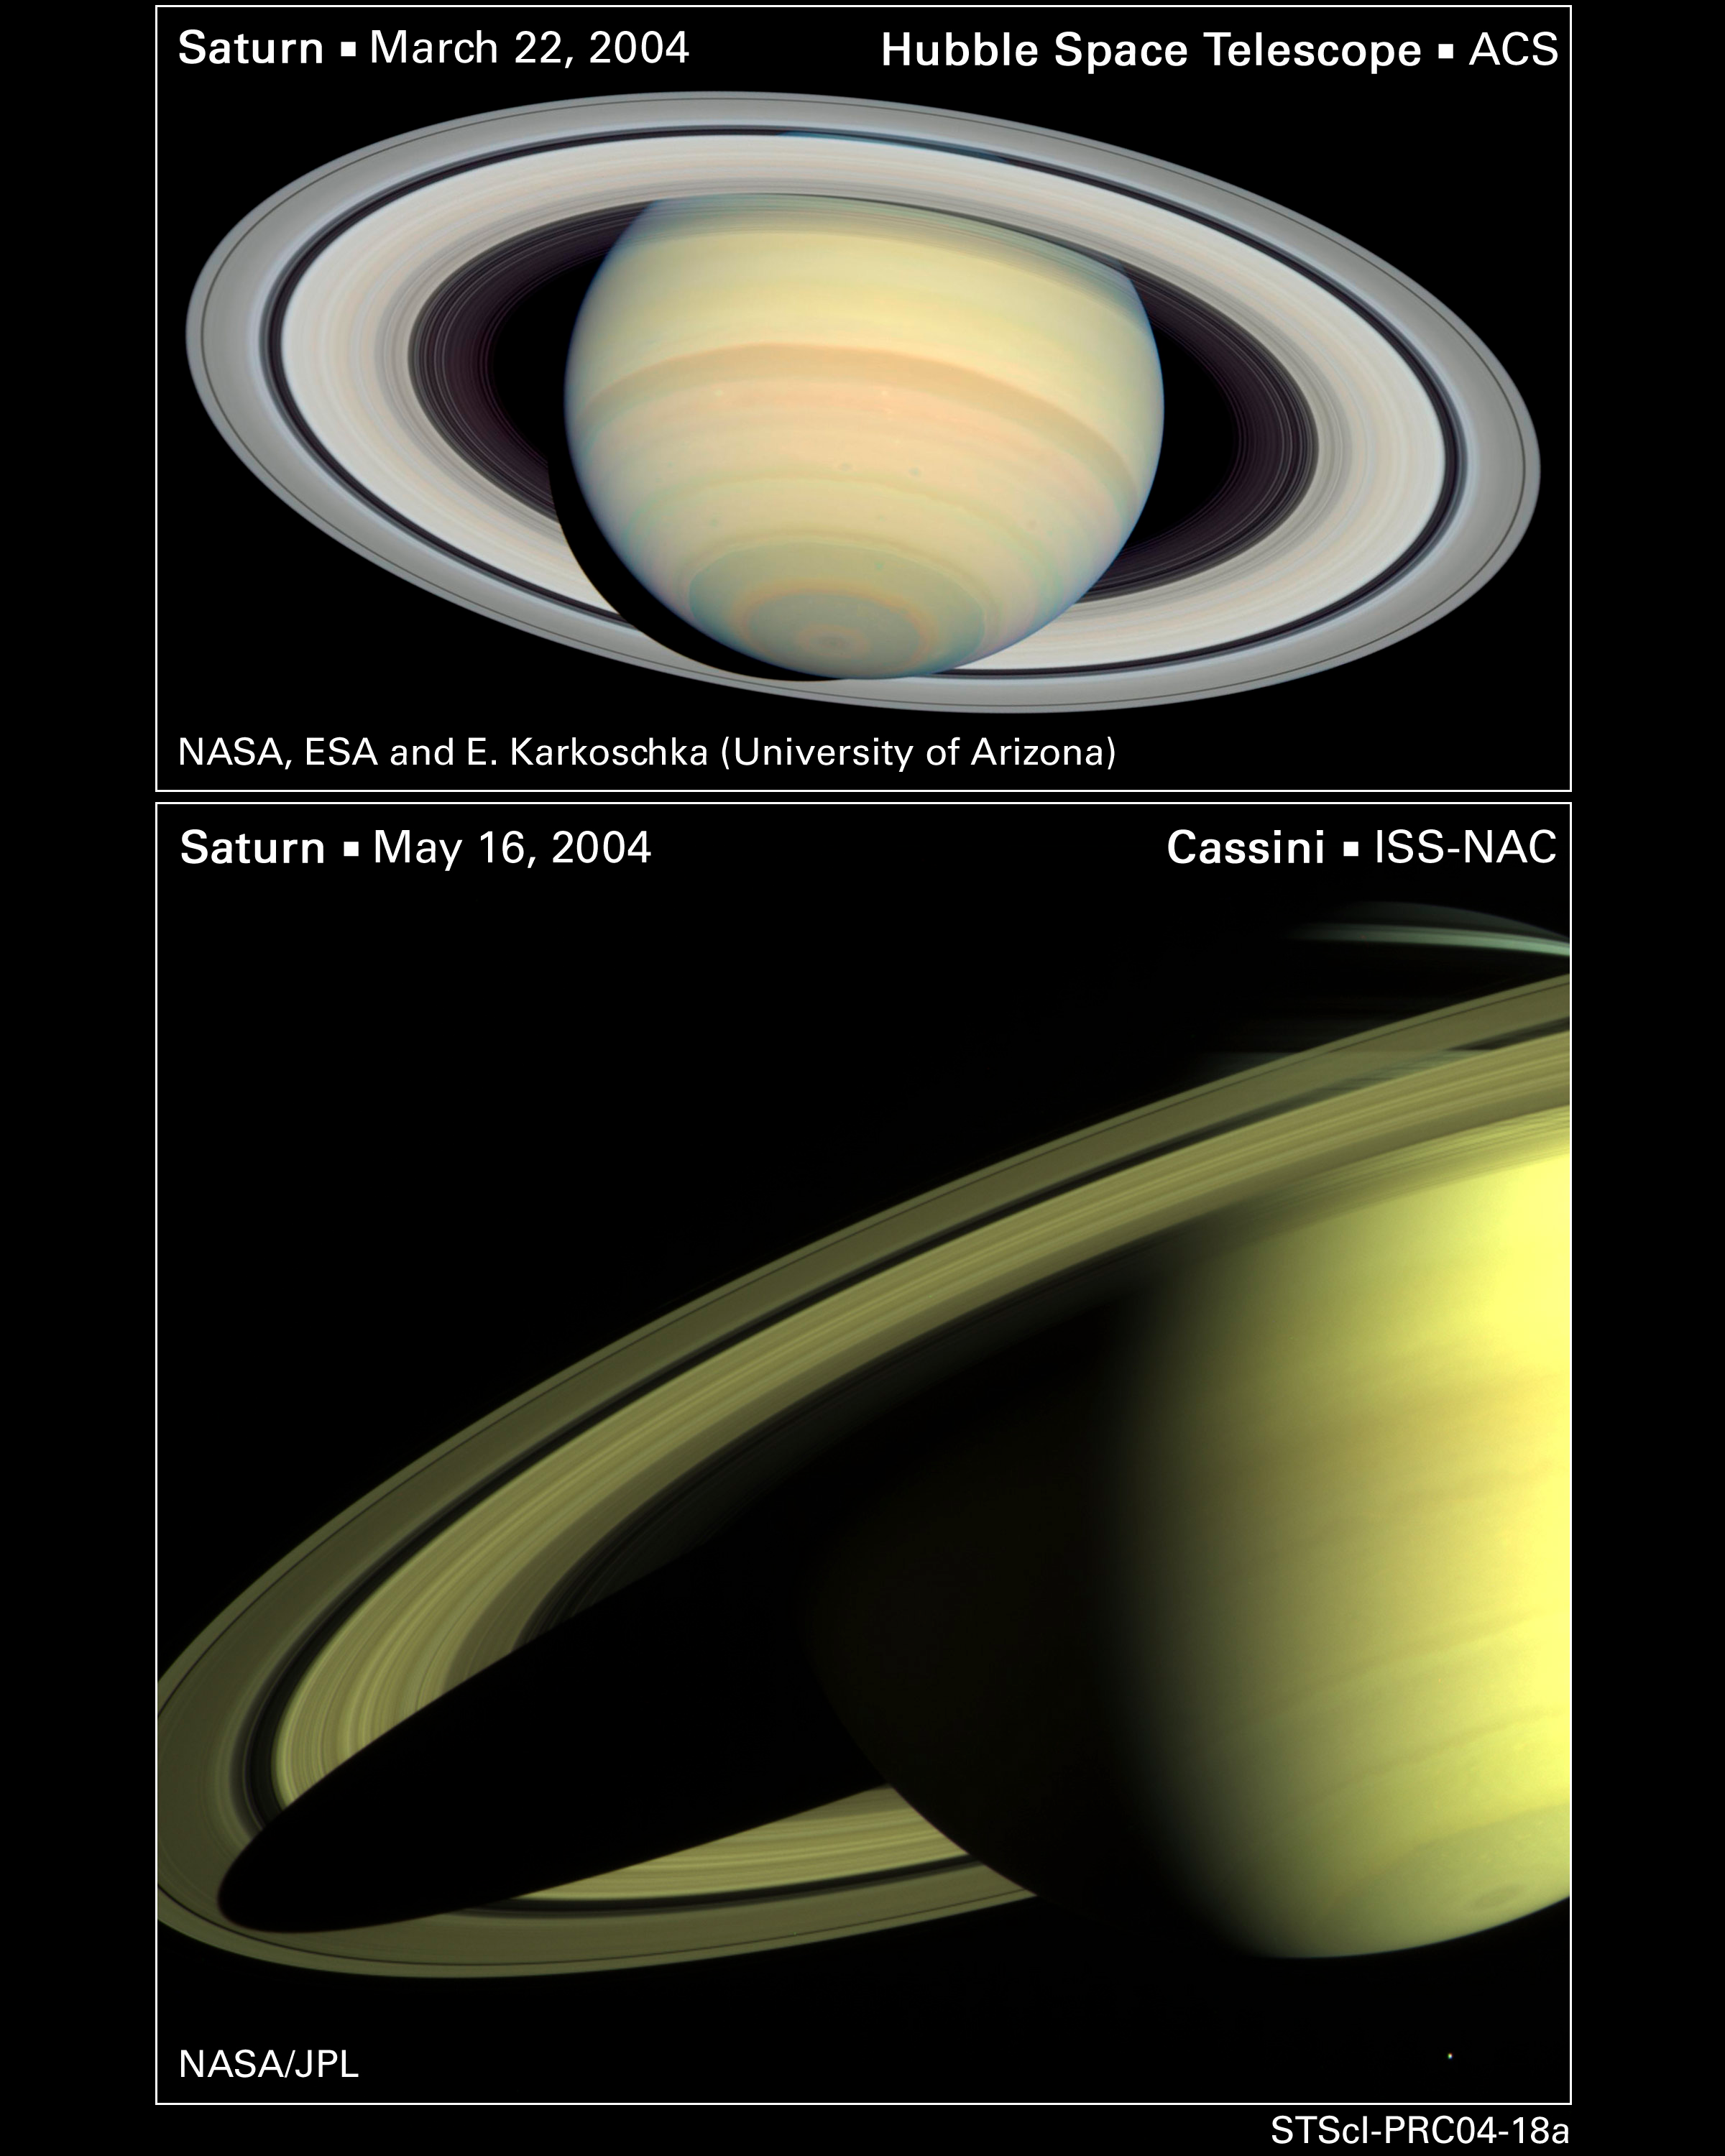

Saturn Seen from Far and Near

Saturn, as seen by Hubble (top) and Cassini (bottom).

Credit: NASA/JPL, ESA and E. Karkoschka (University of Arizona)